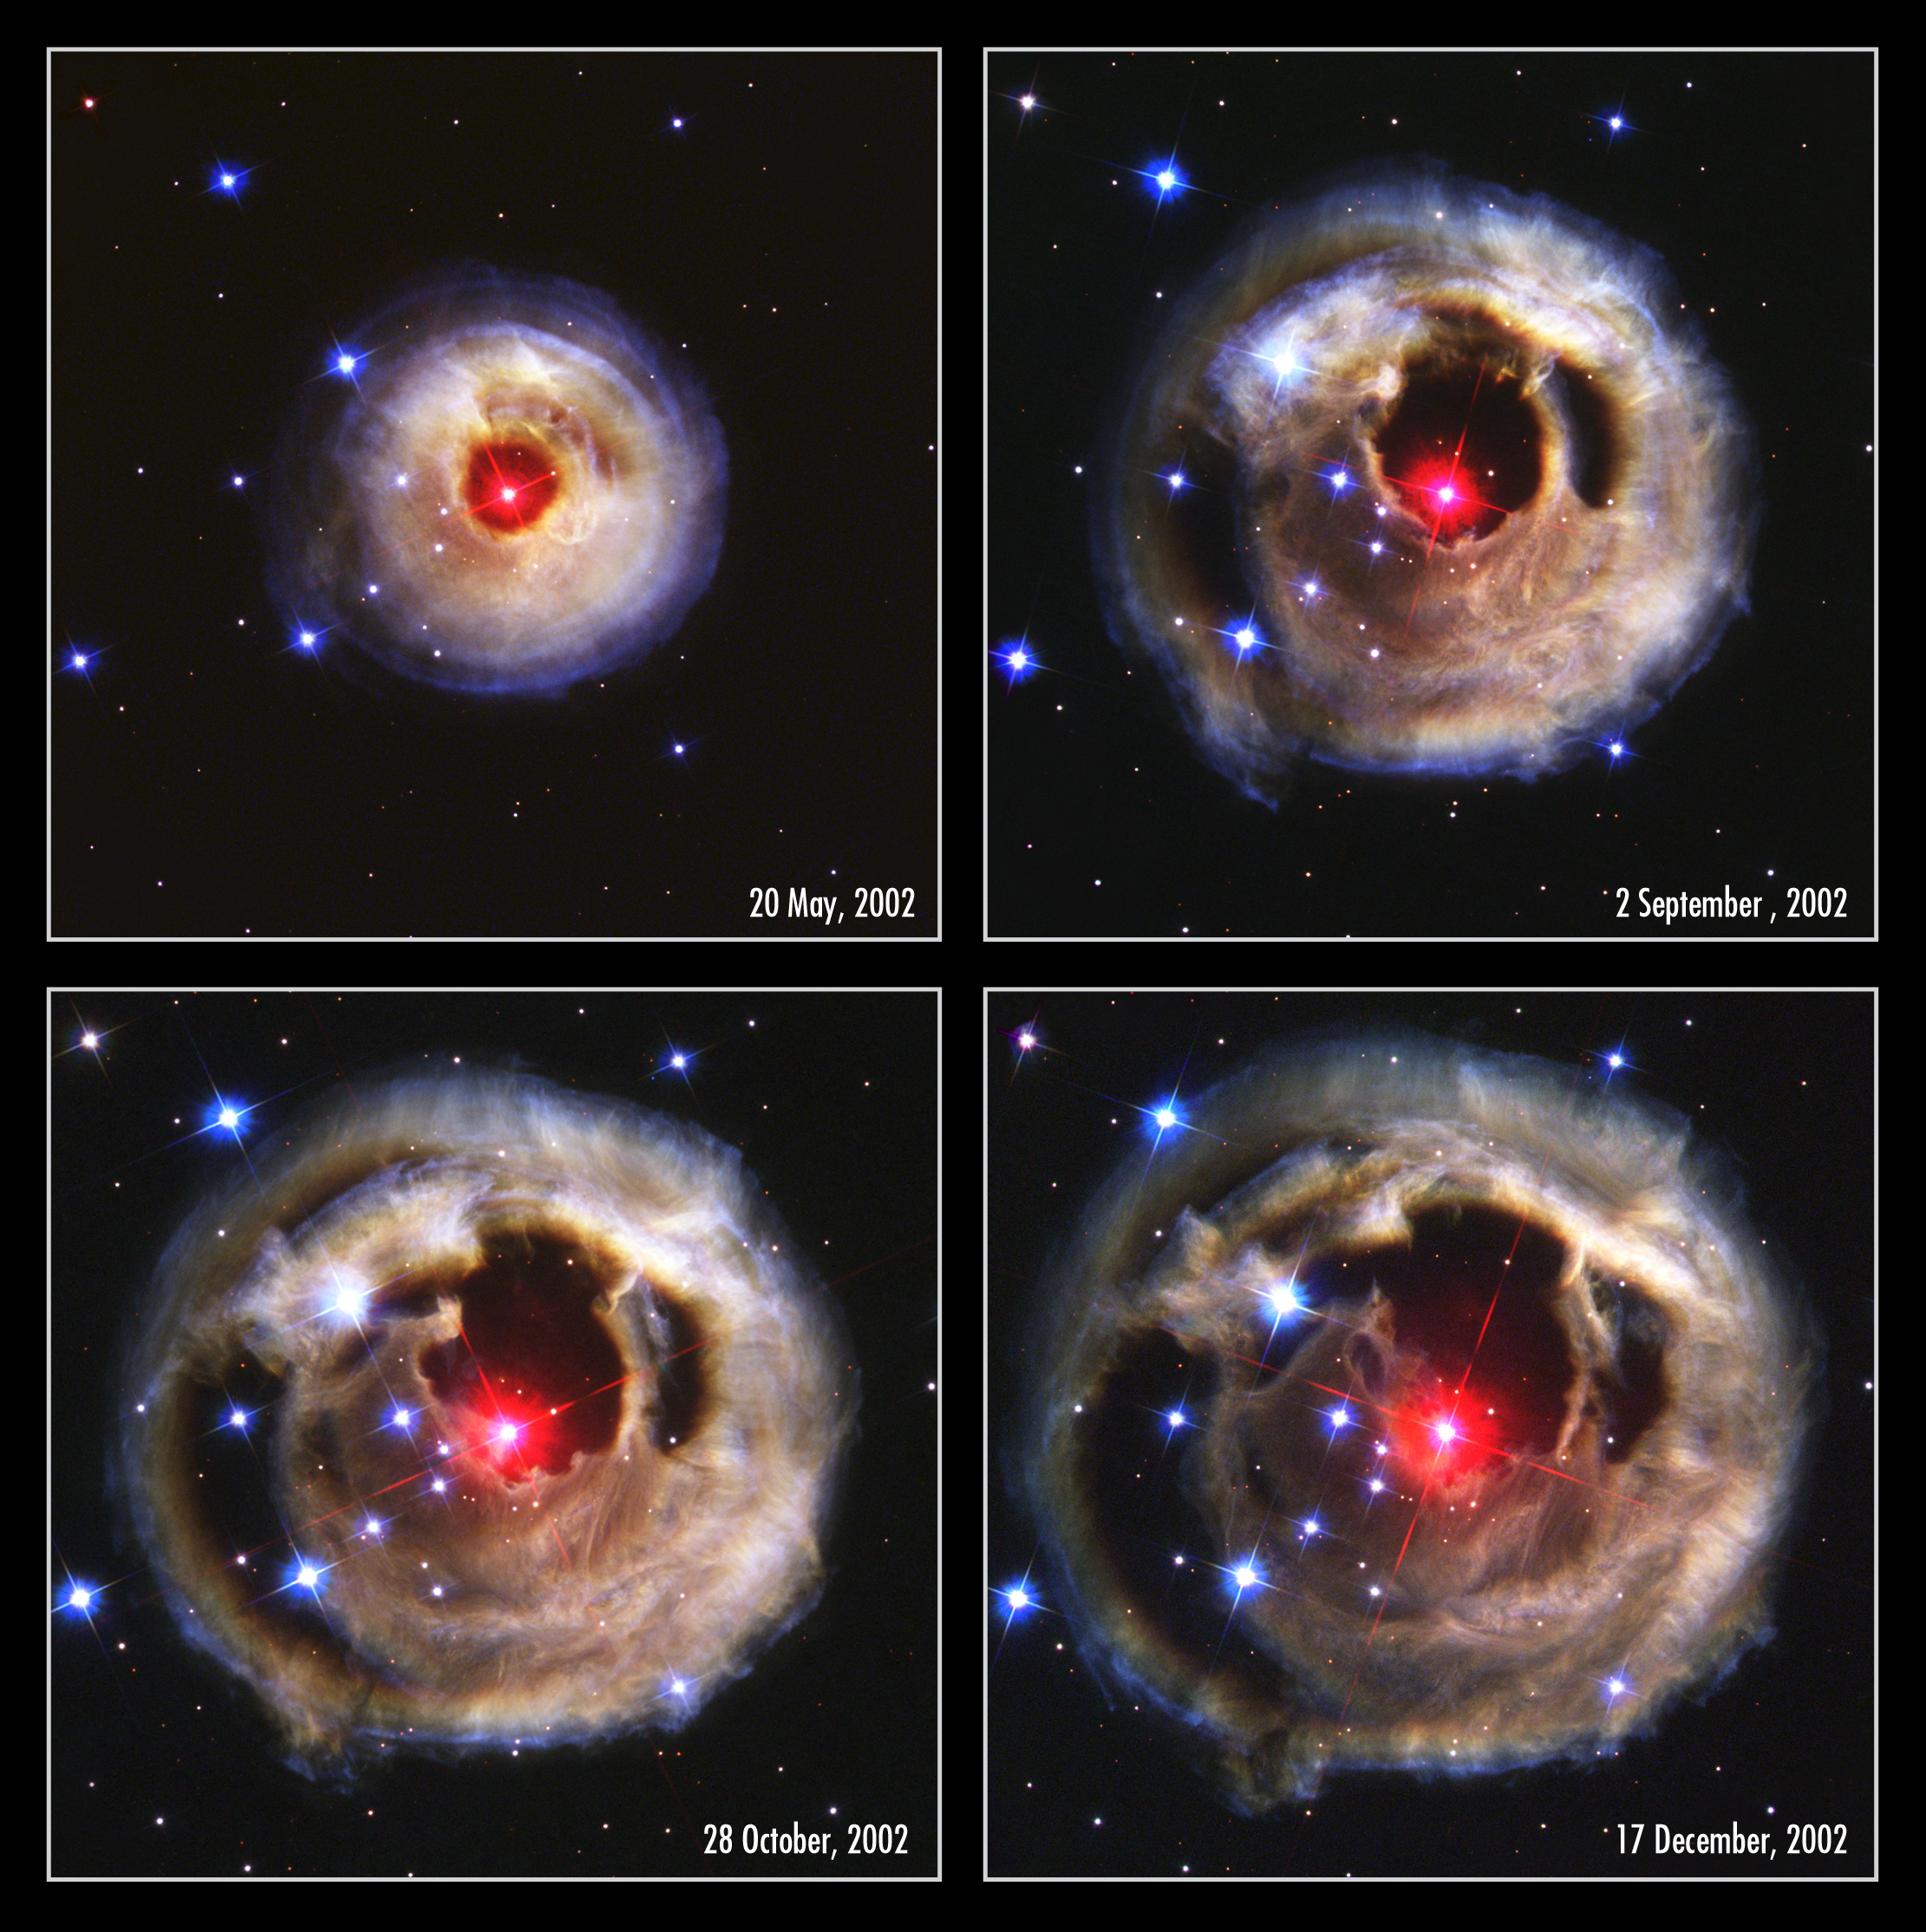

Hubble watches light echo from mysterious erupting star (composite)

This sequence of pictures from the NASA/ESA Hubble Space Telescope's Advanced Camera for Surveys dramatically demonstrates the echoing of light through space caused by an unusual stellar outburst in January 2002. A burst of light from the bizarre star is spreading into space and reflecting off of surrounding shells of dust to reveal a spectacular, multicoloured bull's eye.

This sequence of pictures from May to December 2002 shows apparent changes in the appearance of the circumstellar dust as different parts are illuminated sequentially. This effect is called a 'light echo'. From the first to last image the apparent diameter of the nebula appears to balloon from 4 to 7 light-years. This creates the illusion that the dust is expanding into space faster than the speed of light. In reality the dust shells are not expanding at all, but it is simply the light from the stellar flash that is sweeping out into the nebula. The different colours in the nebula reflect changes in the colour of the star during its outburst.

The red star at the centre of the eyeball-like feature is an unusual erupting supergiant called V838 Monocerotis, located about 20 000 light-years away in the winter constellation Monoceros (the Unicorn). During its outburst the star brightened to more than 600 000 times our Sun's luminosity.

The circular feature has now expanded to slightly larger than the angular size of Jupiter on the sky. It will continue expanding for several years as reflected light arrives from more distant portions of the nebula. Eventually, once light from behind the nebula begins to arrive, the light echo will create the illusion of contraction, and the echo will disappear by about 2010. The black gaps around the red star are regions of space in which there are holes in the dust. This shows the nebula has a Swiss-cheese structure.

Credit: NASA, European Space Agency, and H.E. Bond (STScI)